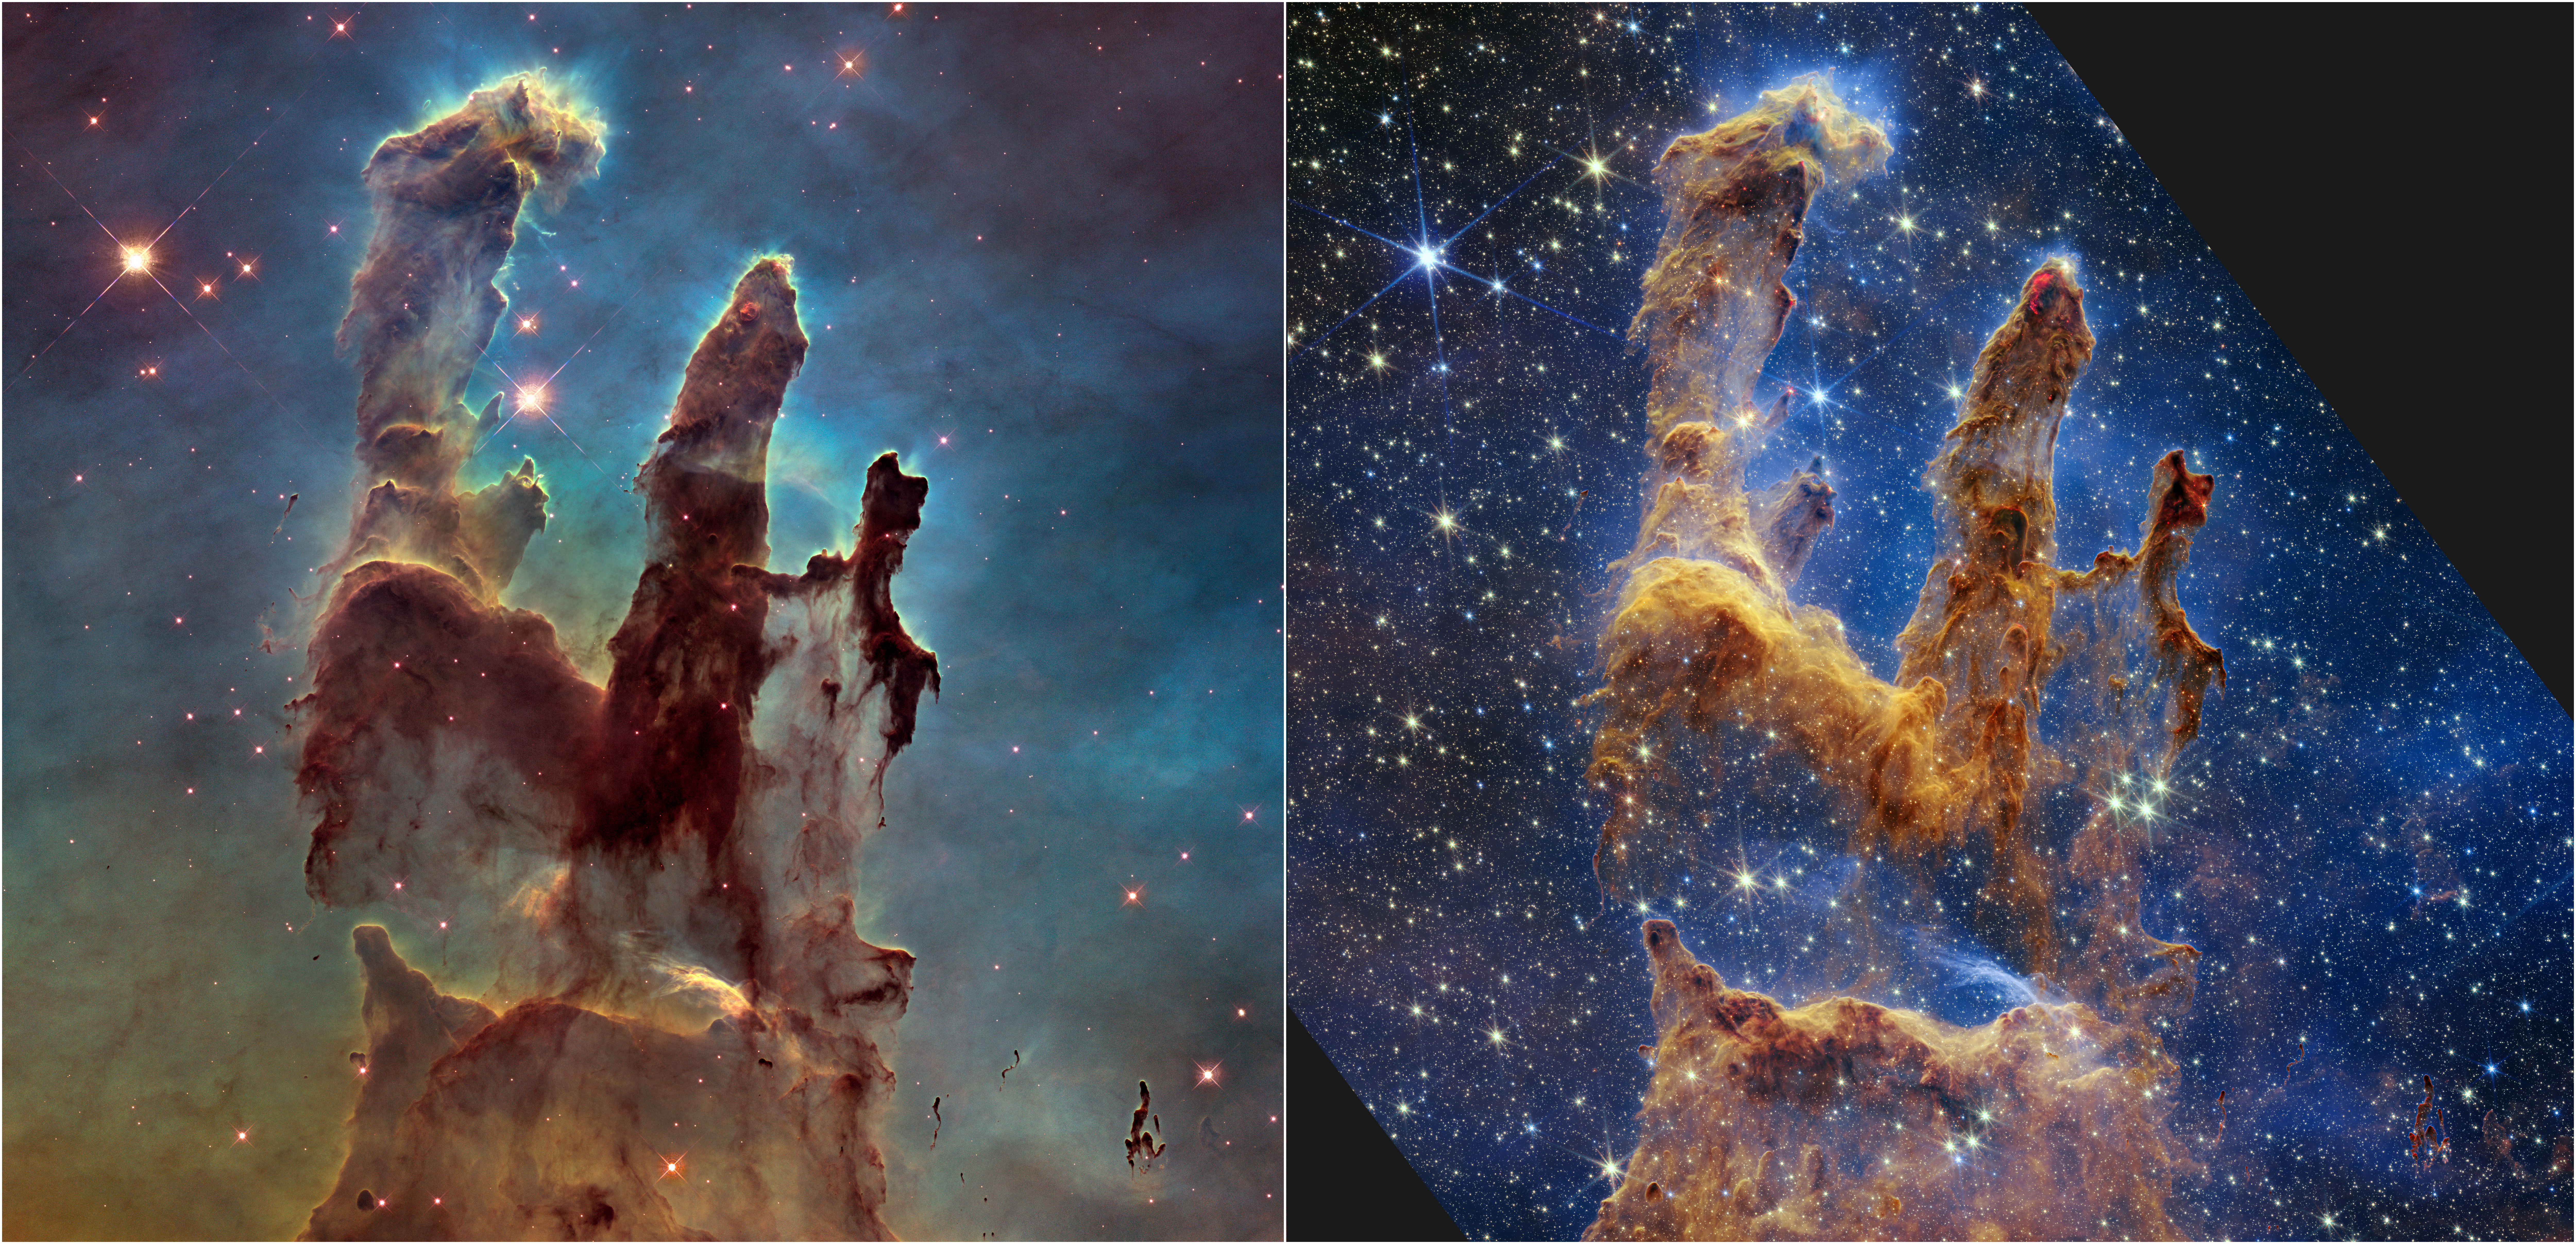

Hubble and Webb Showcase the Pillars of Creation (Side by Side)

The NASA/ESA Hubble Space Telescope made the Pillars of Creation famous with its first image in 1995, but revisited the scene in 2014 to reveal a sharper, wider view in visible light, shown above at left.

A new, near-infrared-light view from the NASA/ESA/CSA James Webb Space Telescope, at right, helps us peer through more of the dust in this star-forming region. The thick, dusty brown pillars are no longer as opaque and many more red stars that are still forming come into view.

While the pillars of gas and dust seem darker and less penetrable in Hubble’s view, they appear more diaphanous in Webb’s.

The background of this Hubble image is like a sunrise, beginning in yellows at the bottom, before transitioning to light green and deeper blues at the top. These colours highlight the thickness of the dust all around the pillars, which obscures many more stars in the overall region.

In contrast, the background light in Webb’s image appears in blue hues, which highlights the hydrogen atoms, and reveals an abundance of stars spread across the scene. By penetrating the dusty pillars, Webb also allows us to identify stars that have recently – or are about to – burst free. Near-infrared light can penetrate thick dust clouds, allowing us to learn so much more about this incredible scene.

Both views show us what is happening locally. Although Hubble highlights many more thick layers of dust and Webb shows more of the stars, neither shows us the deeper universe. Dust blocks the view in Hubble’s image, but the interstellar medium plays a major role in Webb’s. It acts like thick smoke or fog, preventing us from peering into the deeper universe, where countless galaxies exist.

The pillars are a small region within the Eagle Nebula, a vast star-forming region 6,500 light-years from Earth.

Credit: NASA, ESA, CSA, STScI; J. DePasquale, A. Koekemoer, A. Pagan (STScI).